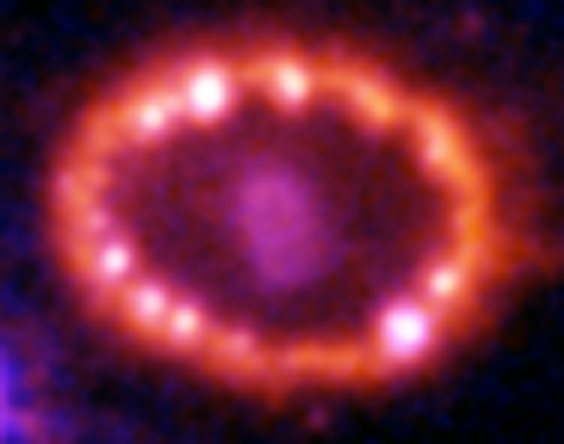

Hubble Supernova 1987A Scrapbook (1994-2003) - Image 13

in 1987, astronomers spotted the brightest stellar explosion ever seen since the one observed by Johannes Kepler over 400 years ago. Called SN 1987A, the titanic supernova explosion blazed with the power of 100,000,000 suns for several months following its discovery on Feb. 23 of that year. Although the supernova itself is over a million times fainter than when it was first discovered, a new light show in the space surrounding it is just beginning.

Credit: NASA/ESA, P. Challis, R. Kirshner (Harvard-Smithsonian Center for Astrophysics) and B. Sugerman (STScI)